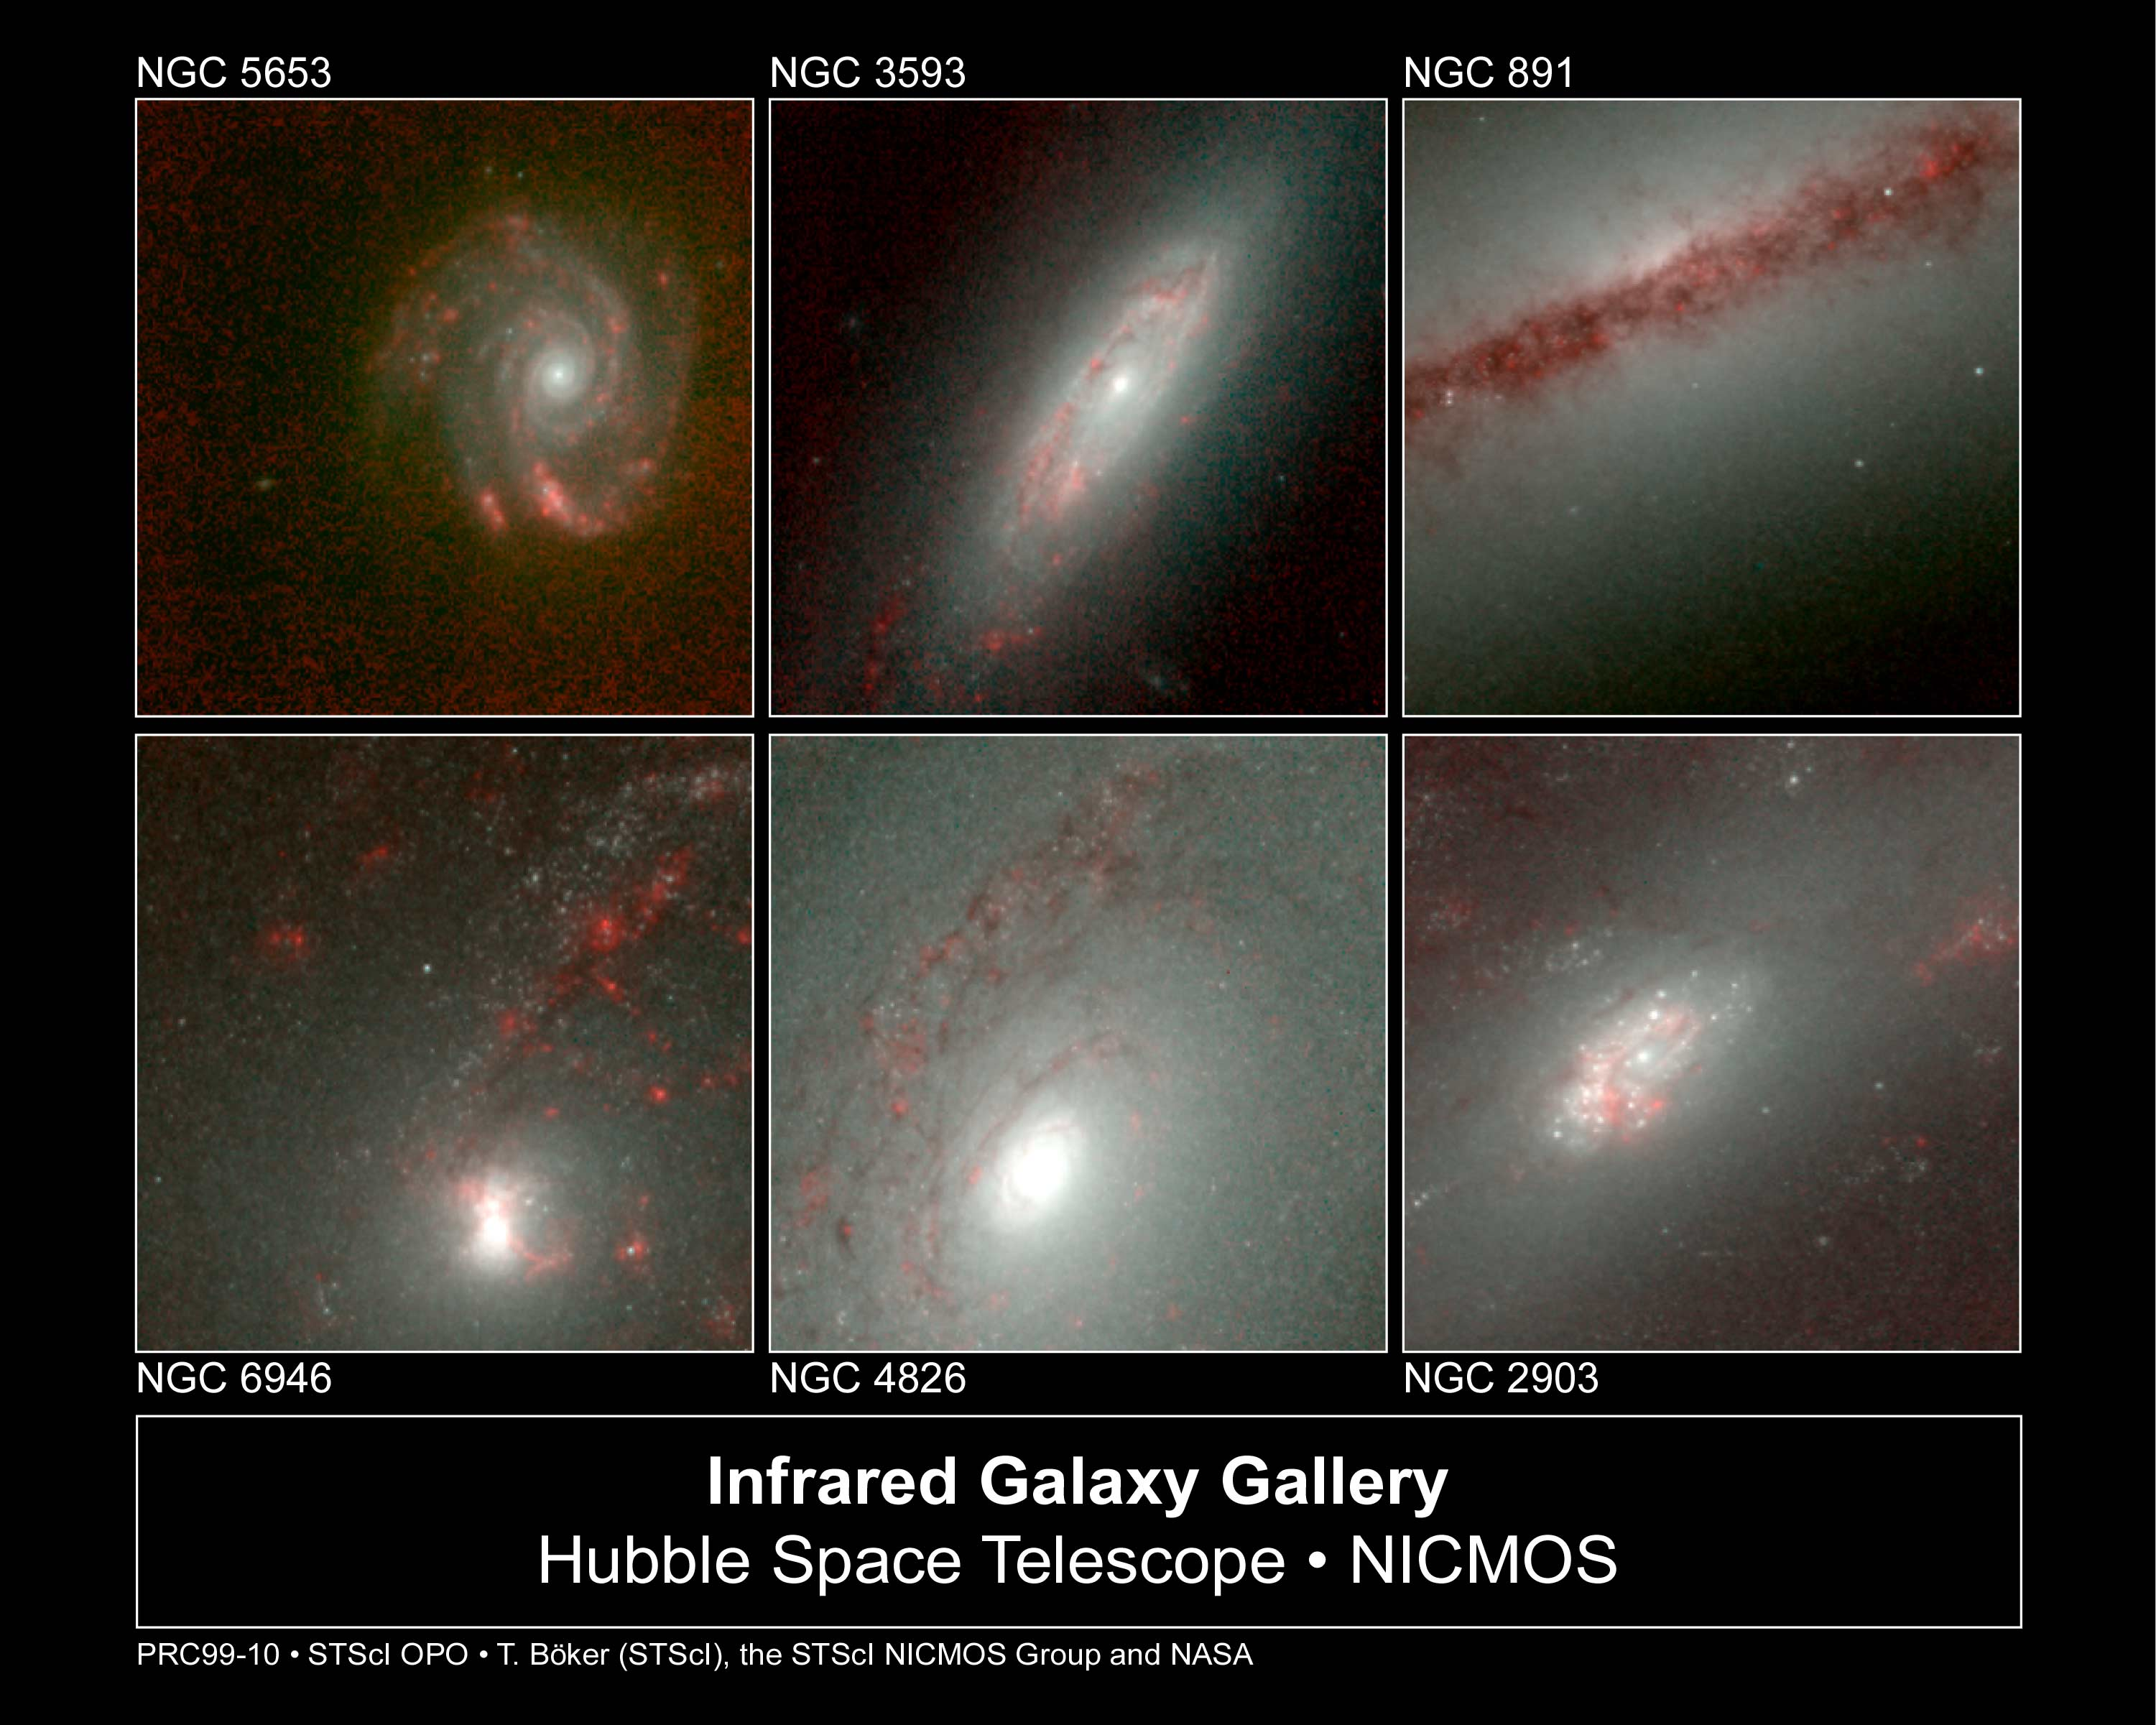

Hubble's infrared galaxy gallery

Astronomers have used the NASA/ESA Hubble Space Telescope to produce an infrared 'photo essay' of spiral galaxies. By penetrating the dust clouds swirling around the centers of these galaxies, the telescope’s infrared vision is offering fresh views of star birth.

Credit: Torsten Boeker, Space Telescope Science Institute, and NASA/ESA